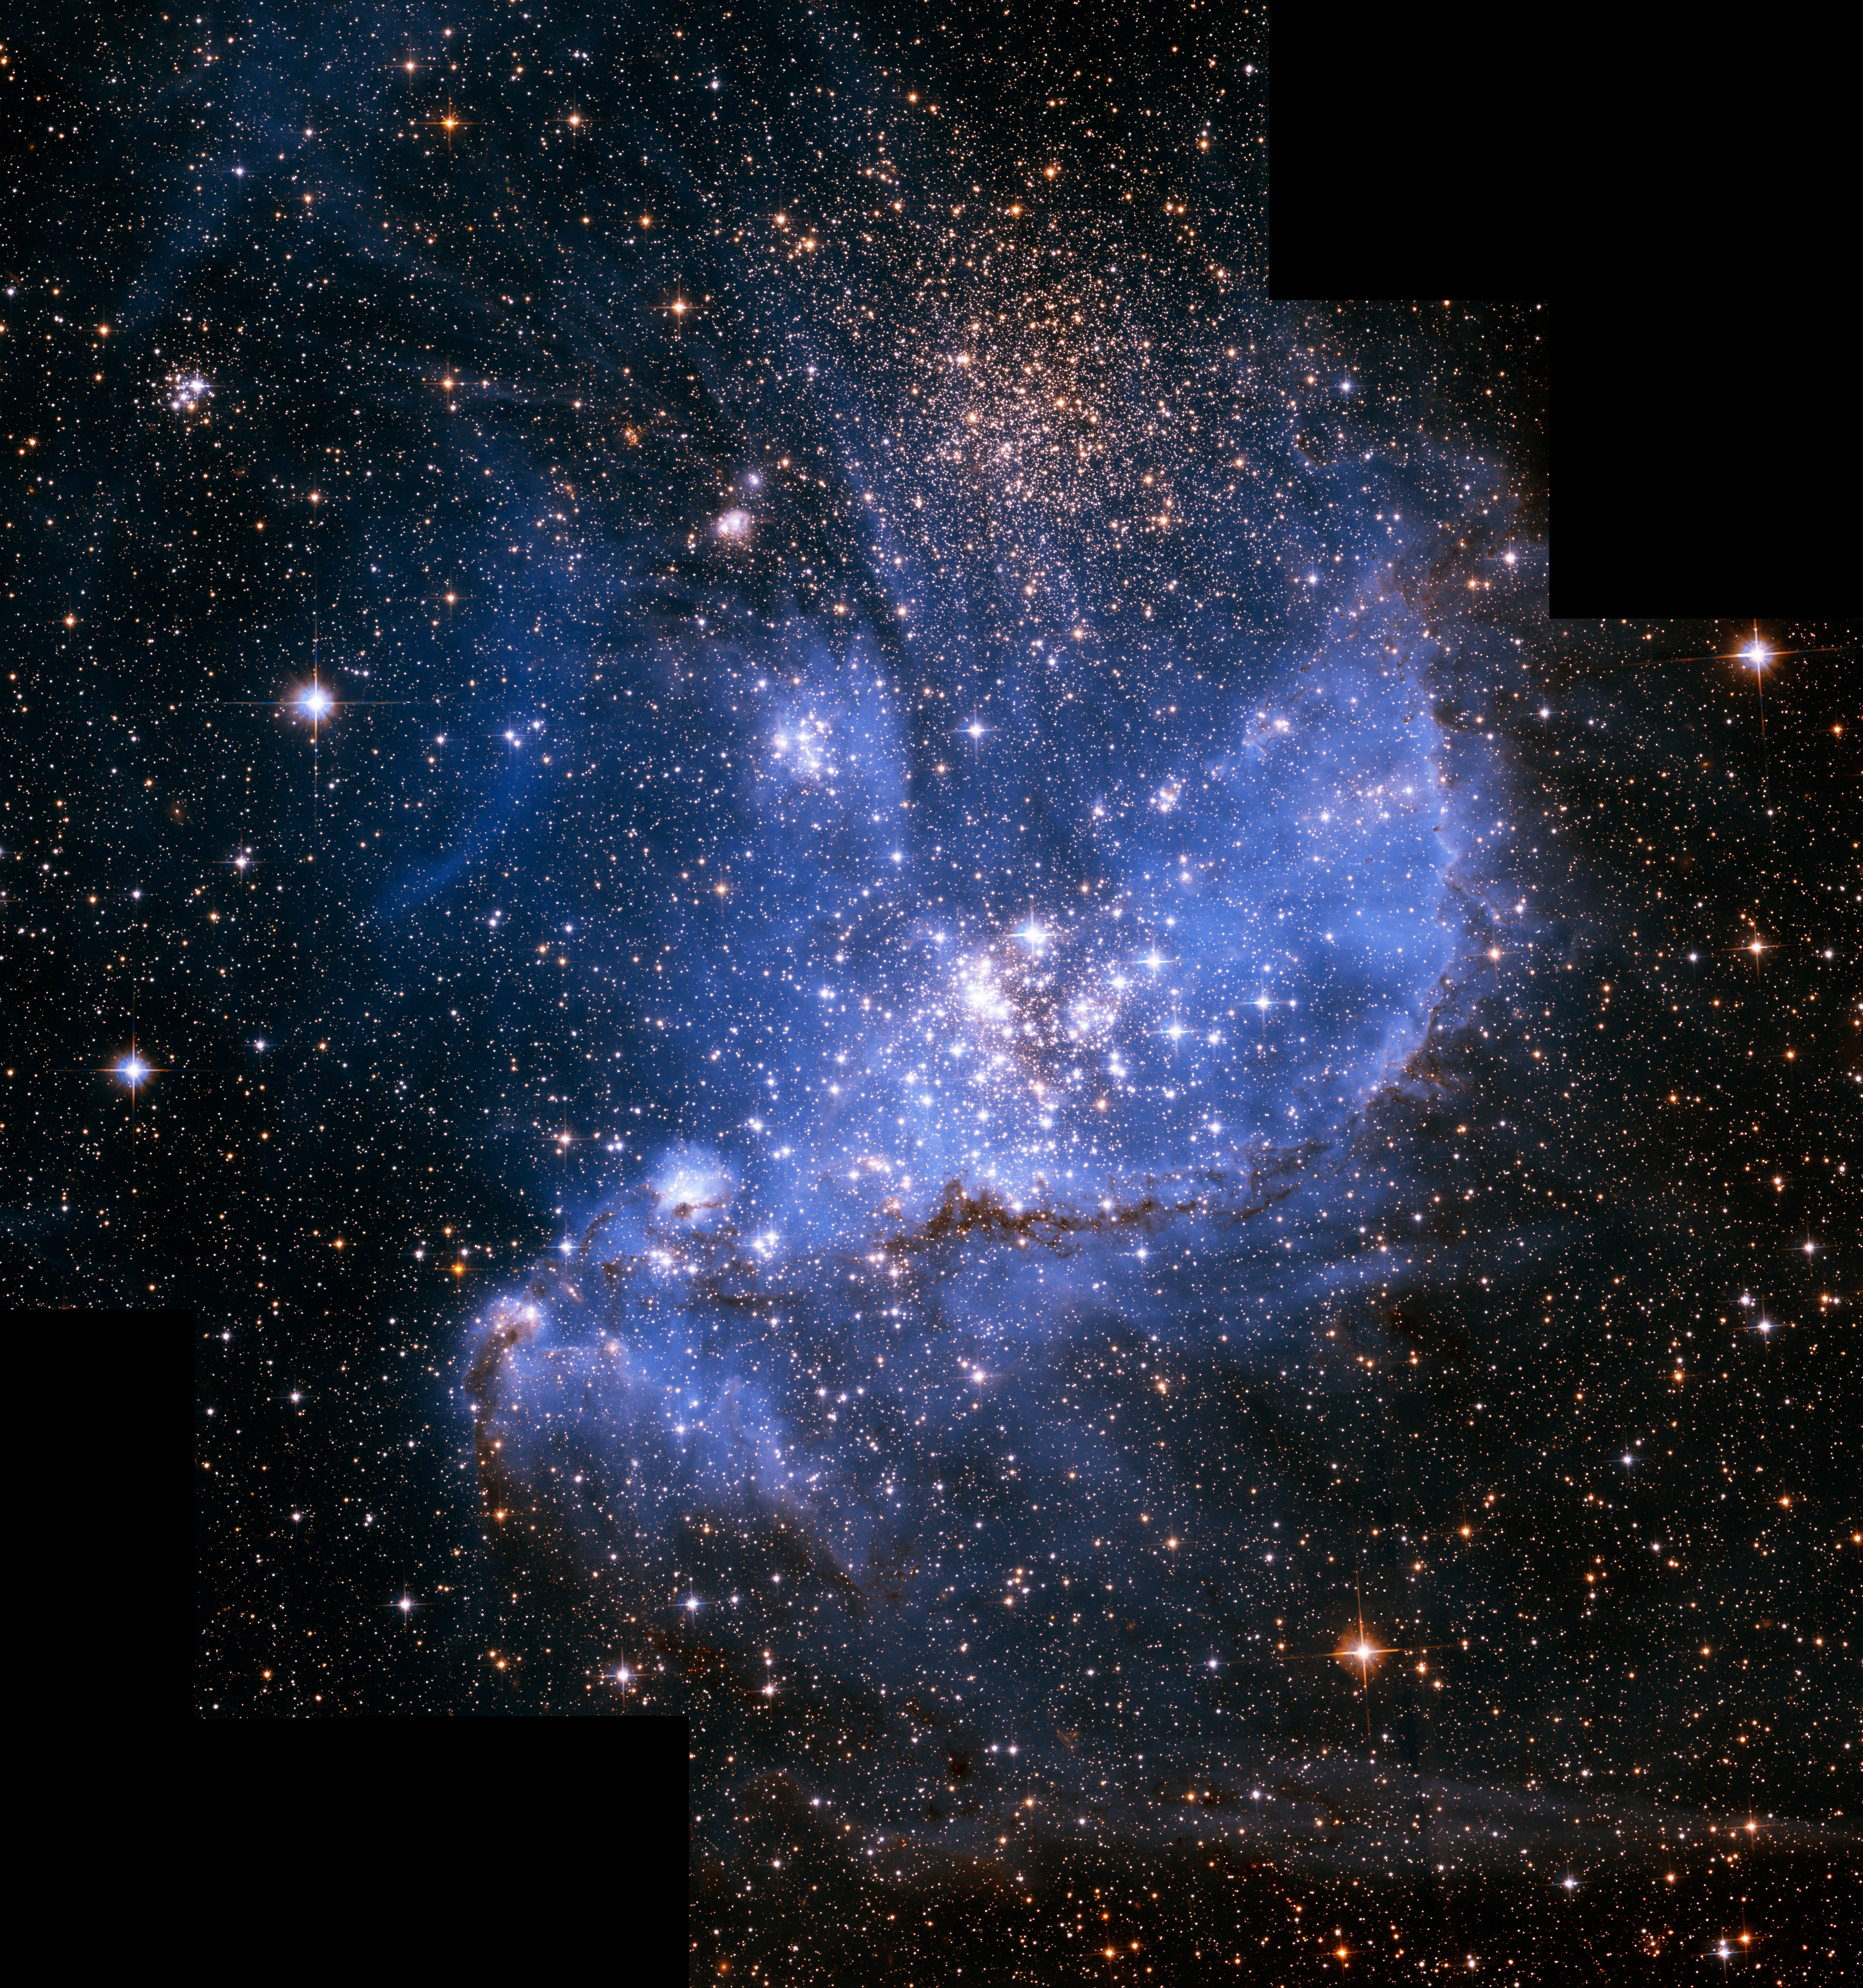

Hubble finds infant stars in neighbouring galaxy

The exquisite sharpness of the NASA/ESA Hubble Space Telescope has plucked out an underlying population of infant stars embedded in the nebula NGC 346 that are still forming from gravitationally collapsing gas clouds. They have not yet ignited their hydrogen fuel to sustain nuclear fusion. The smallest of these infant stars is only half the mass of our Sun.

Credit: NASA, ESA and A. Nota (STScI/ESA)